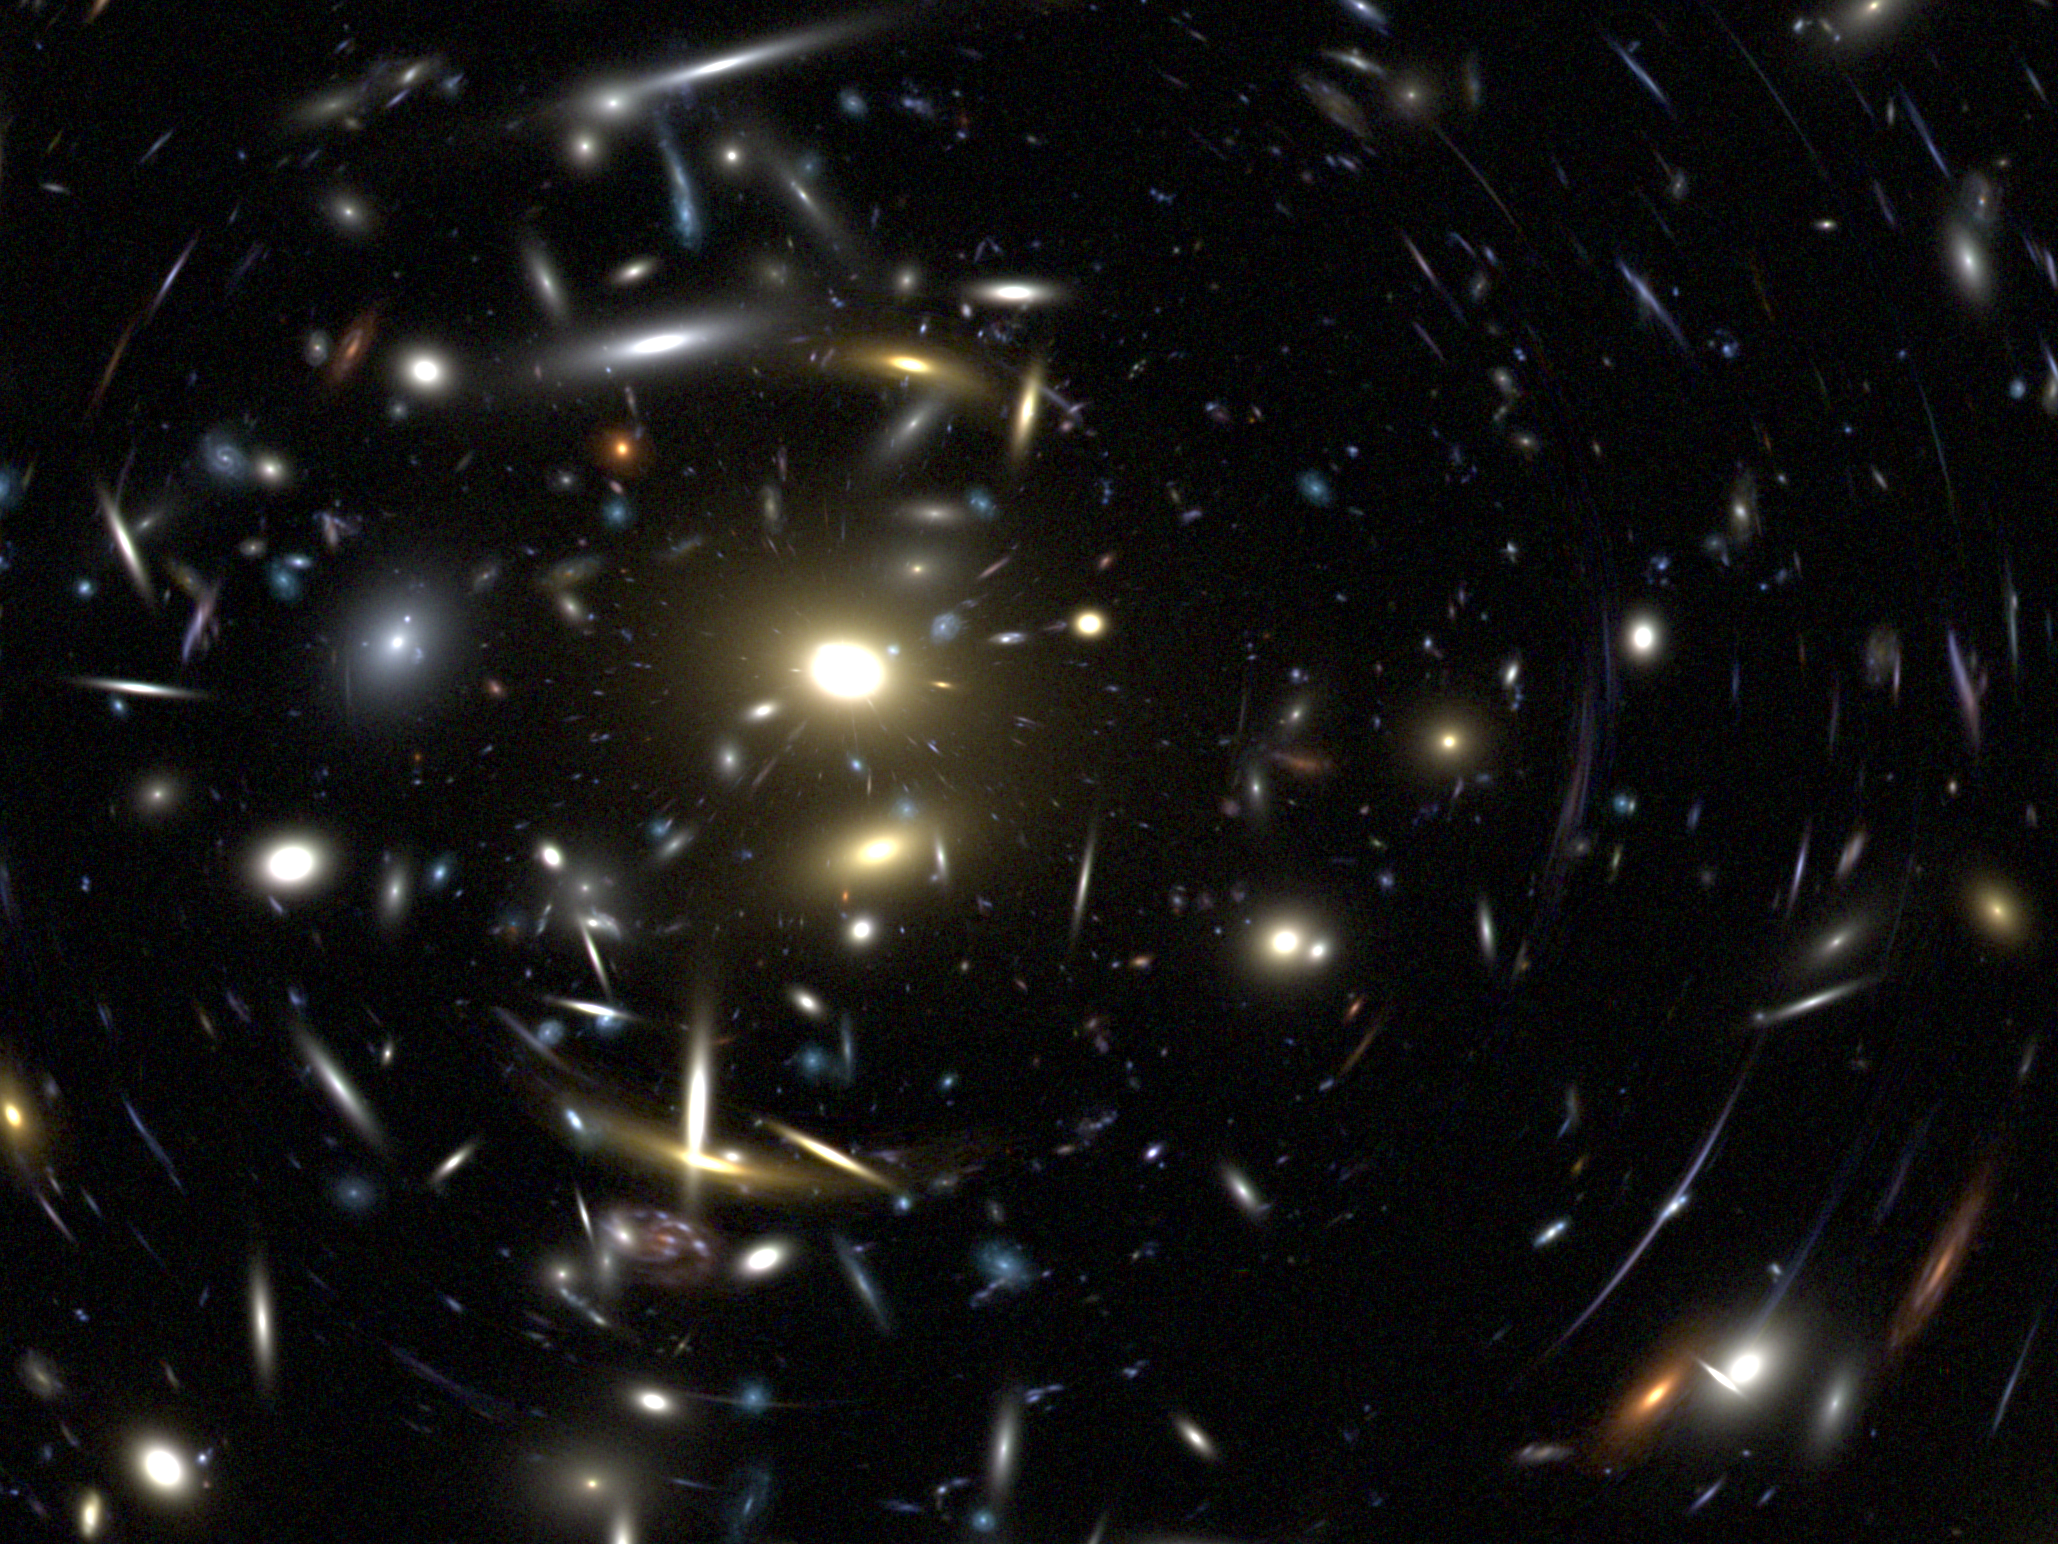

Detailed illustration of ACS' abilities (simulation)

This is a detailed illustration of how much the Advanced Camera for Surveys will reveal of the young Universe.

Credit: NASA/ESA and the ACS Science Team